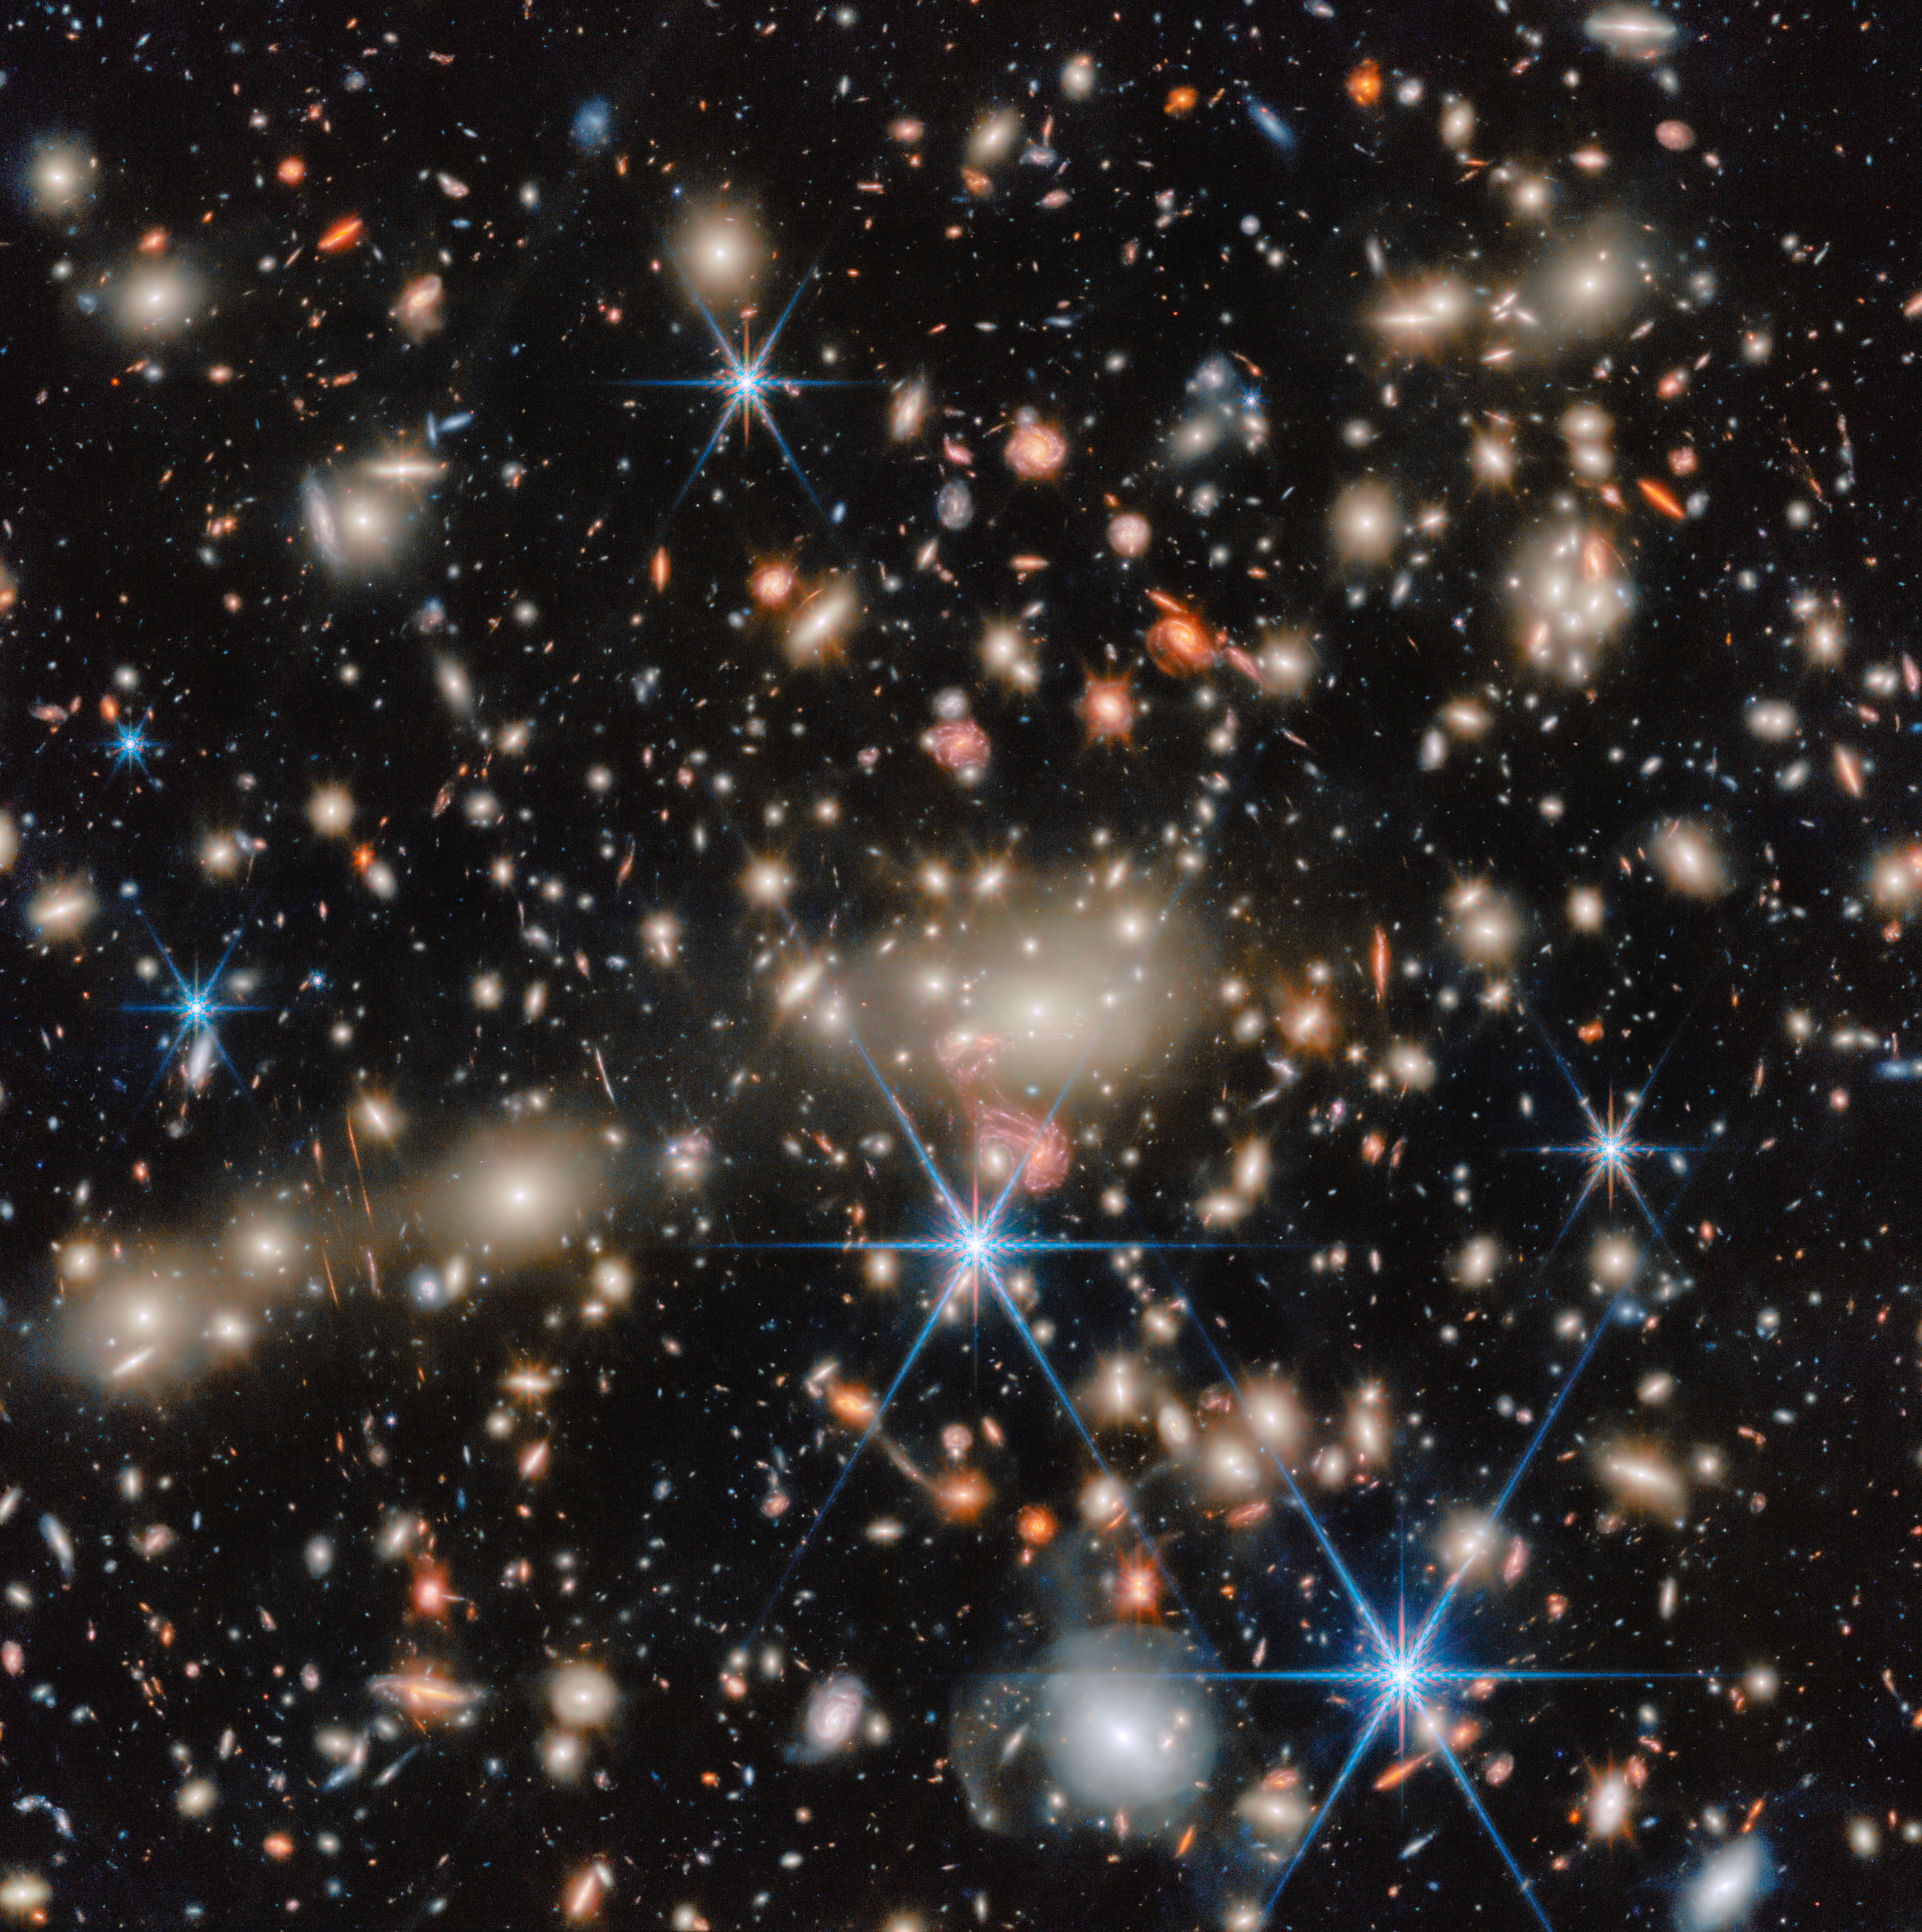

A celebrity cluster in the spotlight

This NASA/ESA/CSA James Webb Space Telescope Picture of the Month brings us a scene from the distant Universe. Pictured here is the galaxy cluster MACS J1149.5+2223, or MACS J1149 for short, which is located about 5 billion light-years away in the constellation Leo.

Galaxy clusters are the largest structures in the Universe that are held together by gravity. Astronomers have confirmed more than 300 galaxies belonging to the MACS J1149 cluster, and they’ve identified several hundred more possible members. At the cluster’s centre, a huddle of ghostly elliptical galaxies rules over the cluster with their immense gravity.

The crushing gravity of this cluster does more than just hold all the galaxies together as they drift through space. As light from galaxies located behind the cluster makes its way toward our telescope, journeying for billions of years, its path through spacetime is bent by the mass of the intervening galaxies.

This phenomenon is called gravitational lensing, and the result is evident in this image of MACS J1149; scattered across the image are subtle and not-so-subtle examples of gravitational lensing, from galaxies that appear to have been stretched into narrow streaks of light to galaxy images that have morphed into strange shapes.

A fantastic example of gravitational lensing can be seen near the centre of the image, just below the brilliant white galaxies at the heart of the cluster. There, the image of a galaxy with distinct spiral arms has been stretched into something resembling a pink jellyfish. This tangled-looking galaxy is home to what was once the most distant single star ever discovered as well as a supernova whose image appeared four times at once.

MACS J1149 has long received the celebrity treatment from leading telescopes, and for good reason. This cluster was one of six investigated through the NASA/ESA Hubble Space Telescope’s Frontier Fields programme. The Frontier Fields galaxy clusters were selected for the strength of their gravitational lensing, and their ability to warp spacetime has granted researchers a glimpse into the early Universe.

Now, Webb is pushing our knowledge horizon to even earlier times, enabling new discoveries like a feasting supermassive black hole less than 600 million years after the Big Bang. Using Webb’s Near-Infrared Spectrograph (NIRSpec), Near-InfraRed Camera (NIRCam), and Near-InfraRed Imager and Slitless Spectrograph (NIRISS), researchers are revealing never-before-seen details of the lives of early galaxies.

The Webb data used to create this image were collected as part of the CAnadian NIRISS Unbiased Cluster Survey (CANUCS) programme #1208 (PI: C. J. Willott). This programme uses Webb’s sensitive instruments to unveil the evolution of low-mass galaxies in the early Universe, revealing their star formation, dust and chemistry. These data will also help researchers study the epoch of reionisation, when the first stars and galaxies lit up the Universe, map the distribution of mass within galaxy clusters, and understand how star formation can slow to a trickle in a cluster environment.

Credit: ESA/Webb, NASA & CSA, C. Willott (National Research Council Canada), R. Tripodi (INAF - Astronomical Observatory of Rome)